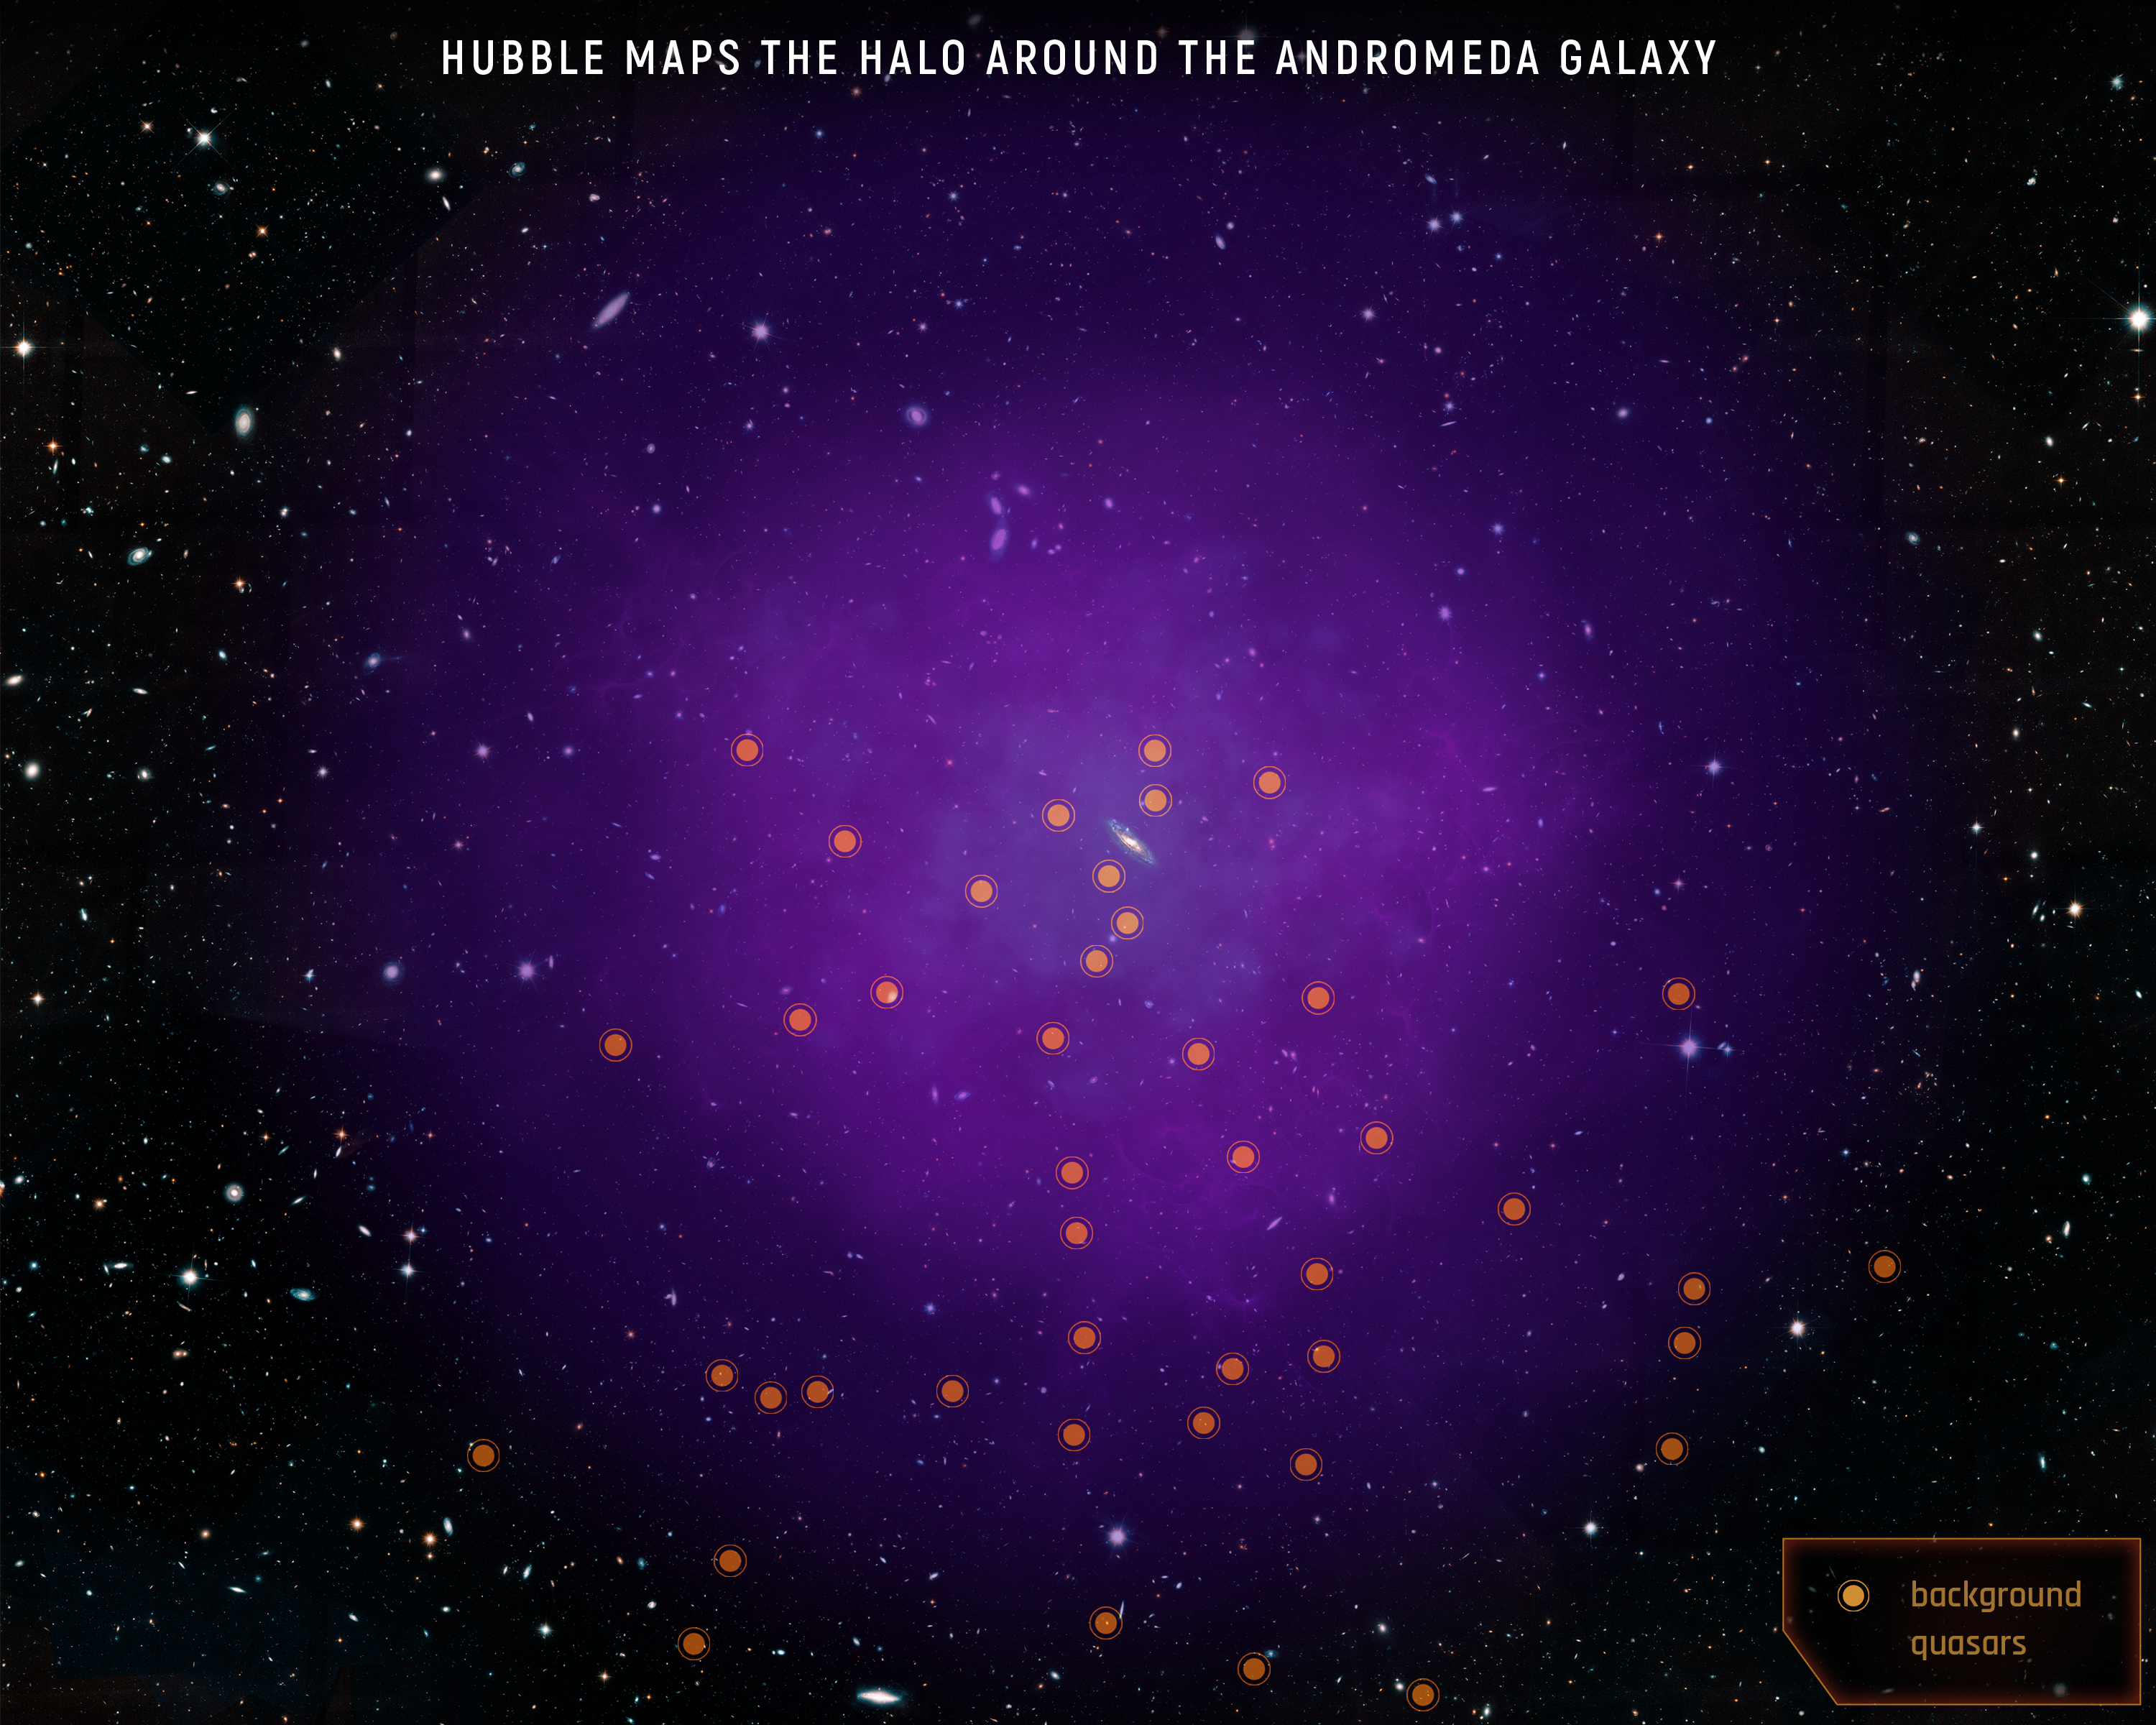

Hubble Maps a Giant Halo Around the Andromeda Galaxy

Scientists using the NASA/ESA Hubble Space Telescope have mapped the immense halo of gas enveloping the Andromeda galaxy, our nearest large galactic neighbor. Scientists were surprised to find that this nearly invisible halo of diffuse plasma extends 1.3 million light-years from the galaxy—about halfway to our Milky Way—and as far as 2 million light-years in some directions. They also found that the halo has a layered structure, with two main nested and distinct shells of gas.

This is the most comprehensive study of a halo surrounding a galaxy. Called Project AMIGA (Absorption Map of Ionized Gas in Andromeda), the study examined the light from 43 quasars—the very distant, brilliant cores of active galaxies powered by black holes—located far beyond Andromeda. The quasars are scattered behind the halo, allowing scientists to probe multiple regions. Looking through the halo at the quasars’ light, the team observed how this light is absorbed by the Andromeda halo and how that absorption changes in different regions.

Credit: NASA, ESA, E. Wheatley